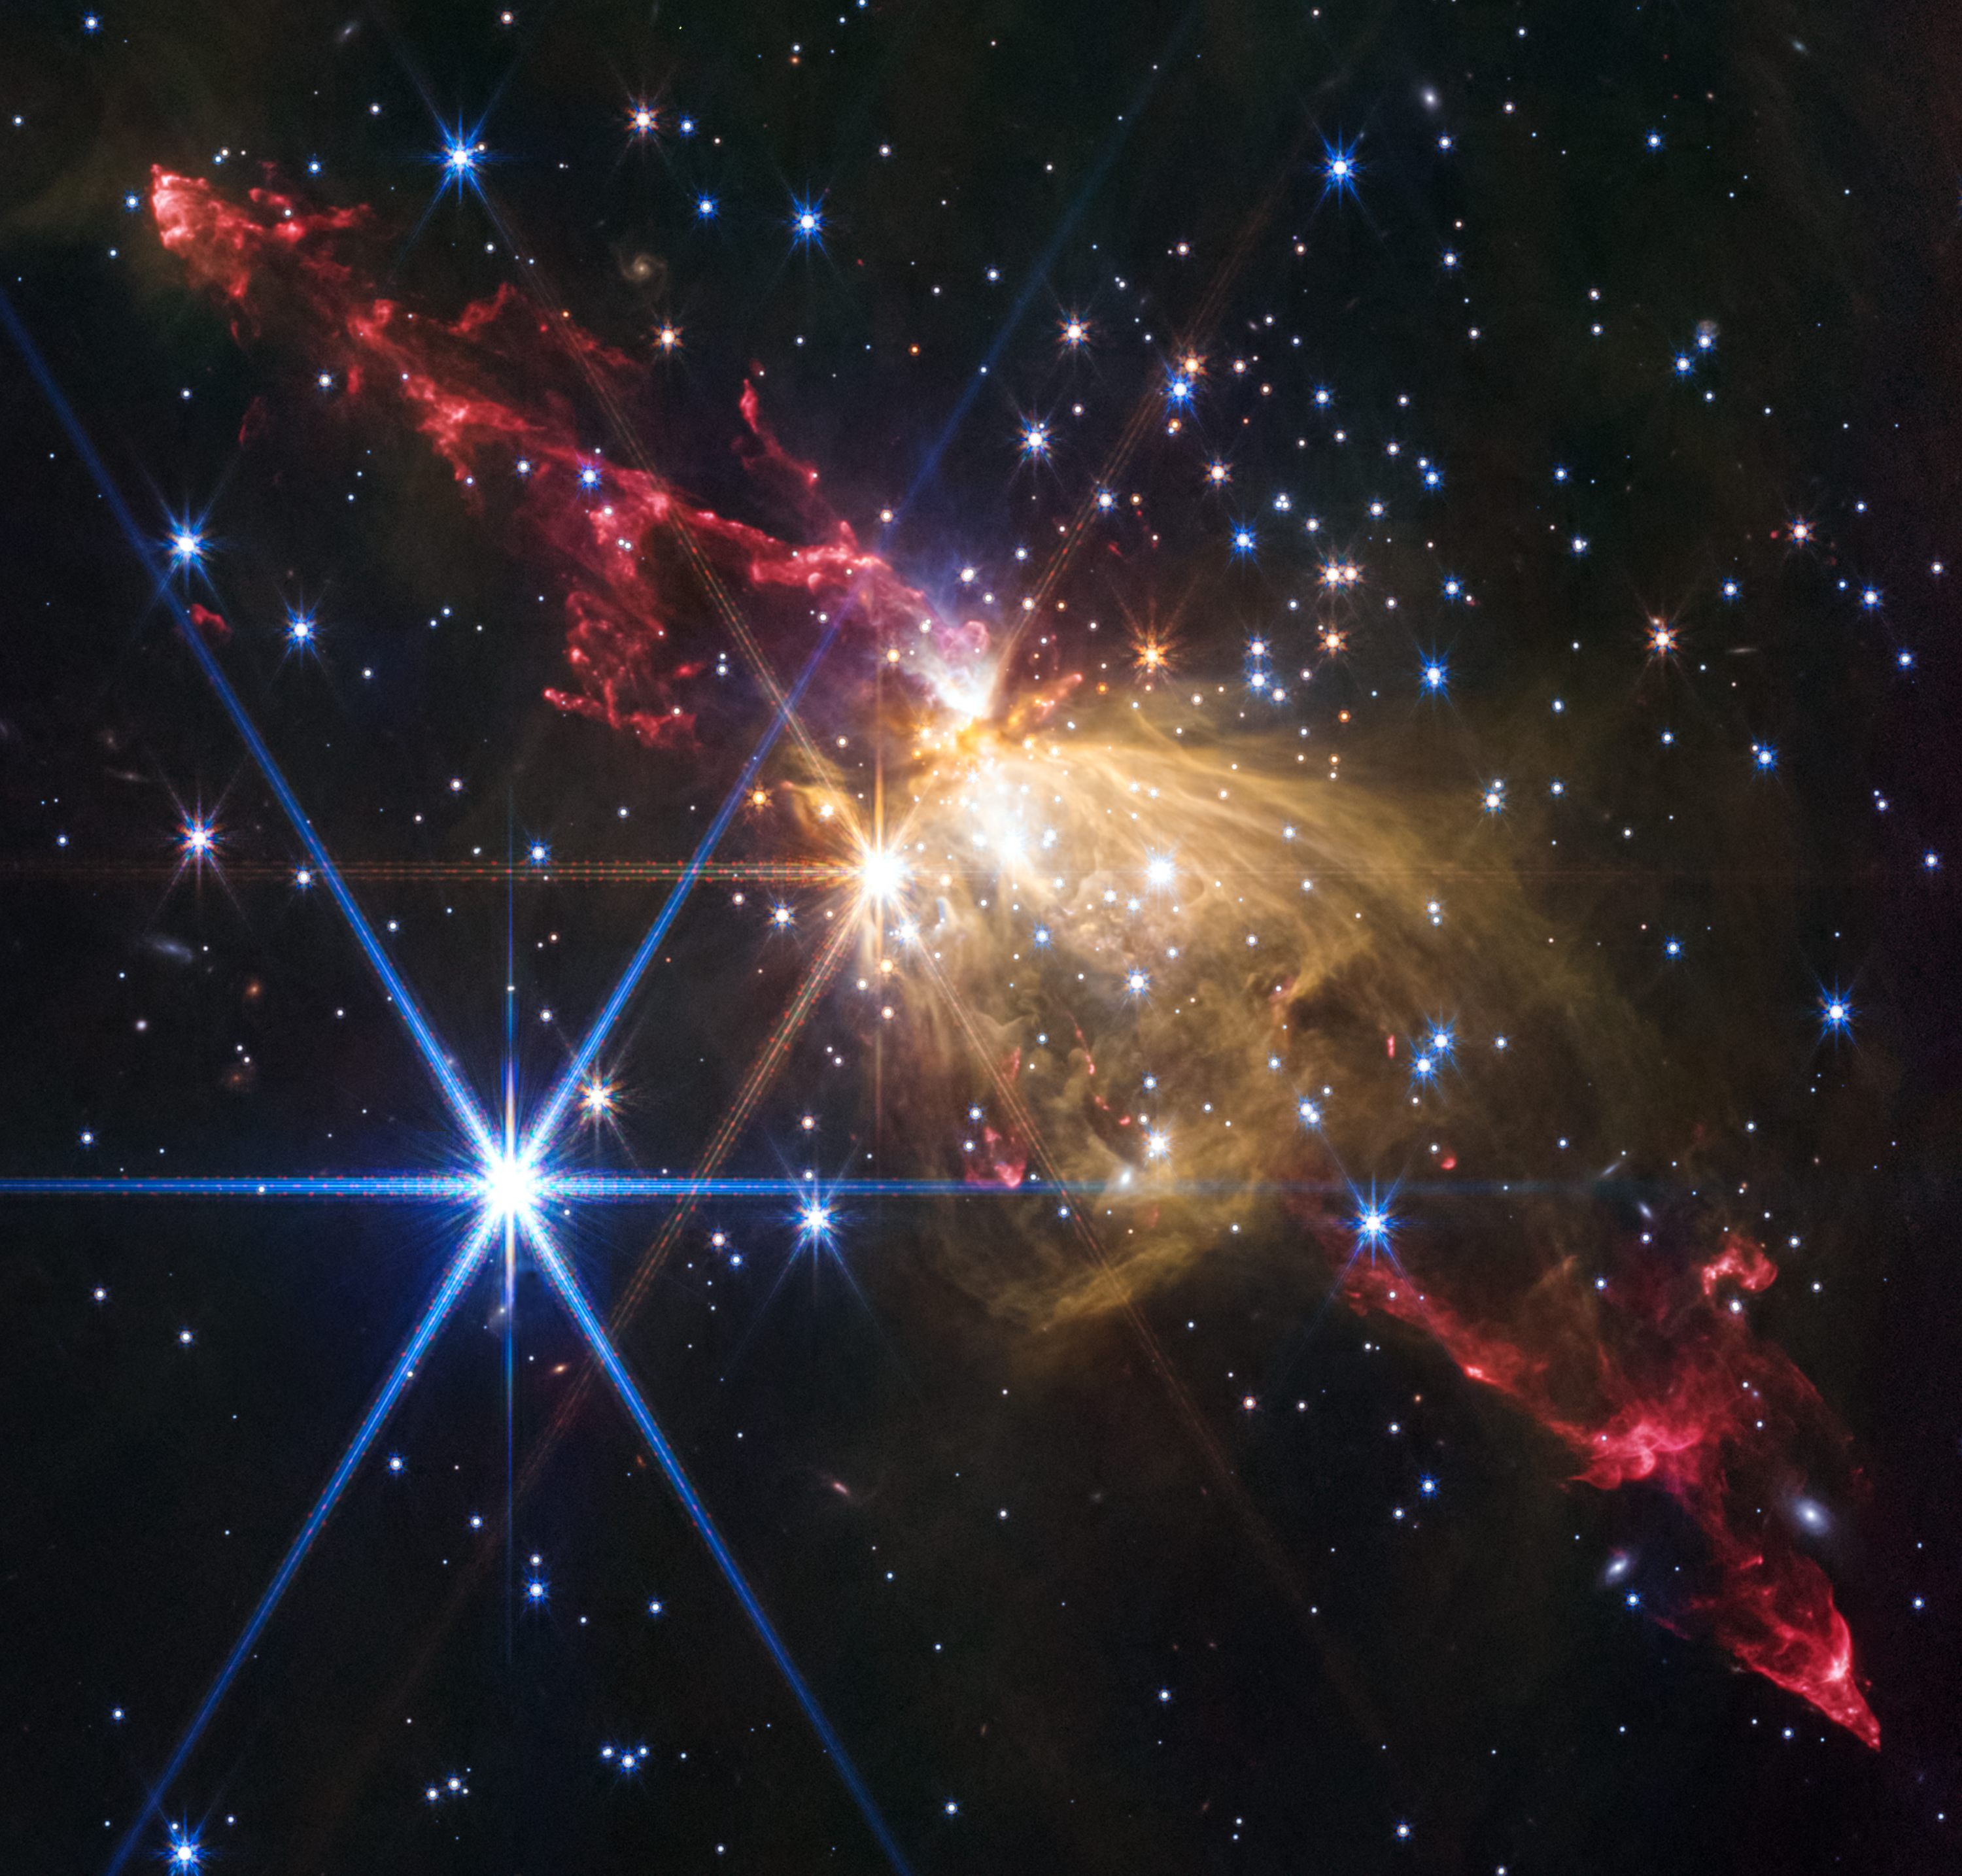

Stellar jet in Sh2-284 (NIRCam image)

The NASA/ESA/CSA James Webb Space Telescope recently imaged an extremely large stellar jet at the outskirts of our Milky Way galaxy in the proto-cluster Sh2-284. This Herbig-Haro (HH) object, jets of plasma shooting out from newly formed stars, is 8 light-years across. This is about double the distance from our Sun to its closest neighboring star system, Alpha Centauri.

Its detection provides evidence that HH jets scale with the mass of their parent stars—the more massive the stellar engine driving the plasma, the larger the resulting jet.

Credit: NASA, ESA, CSA, STScI, Y. Cheng (NAOJ), J. DePasquale (STScI)